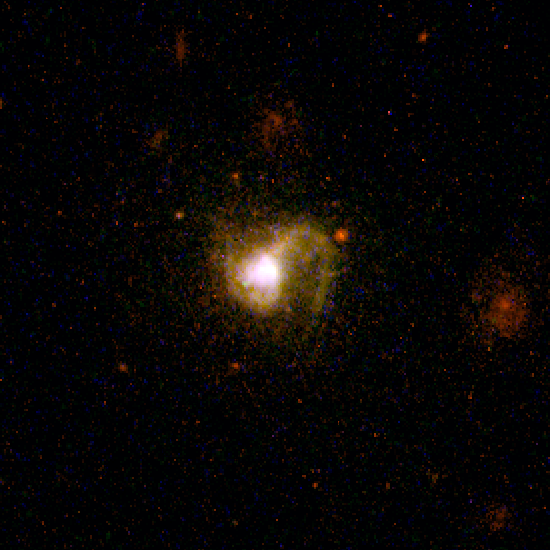

Dwarf Galaxy POX 186

New detailed images from the NASA/ESA Hubble Space Telescope show a 'late-blooming' galaxy, a small, distorted system of gas and stars that still appears to be in the process of development, even though most of its galactic cousins are believed to have started forming billions of years ago.

Evidence of the galaxy's youthfulness can be seen in the burst of newborn stars and its disturbed shape. This evidence indicates that the galaxy, called POX 186, formed when two smaller clumps of gas and stars collided less than 100 million years ago (a relatively recent event in the universe's 13-billion-year history), triggering more star formation. Most large galaxies, such as our Milky Way, are thought to have formed the bulk of their stars billions of years ago.

Credit: NASA/ESA and Michael Corbin (CSC/STScI)